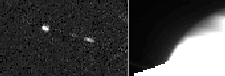

New saturnian moon discovered

Identified as S/1995 S3, the moon appears as an elongated white spot near the center of each image.

Credit: Amanda S. Bosh (Lowell Observatory), Andrew S. Rivkin (Lowell Observatory and University of Arizona/Lunar Planetary Lab), High Speed Photometer Instrument Definition Team (R.C. Bless, PI), and NASA/ESA